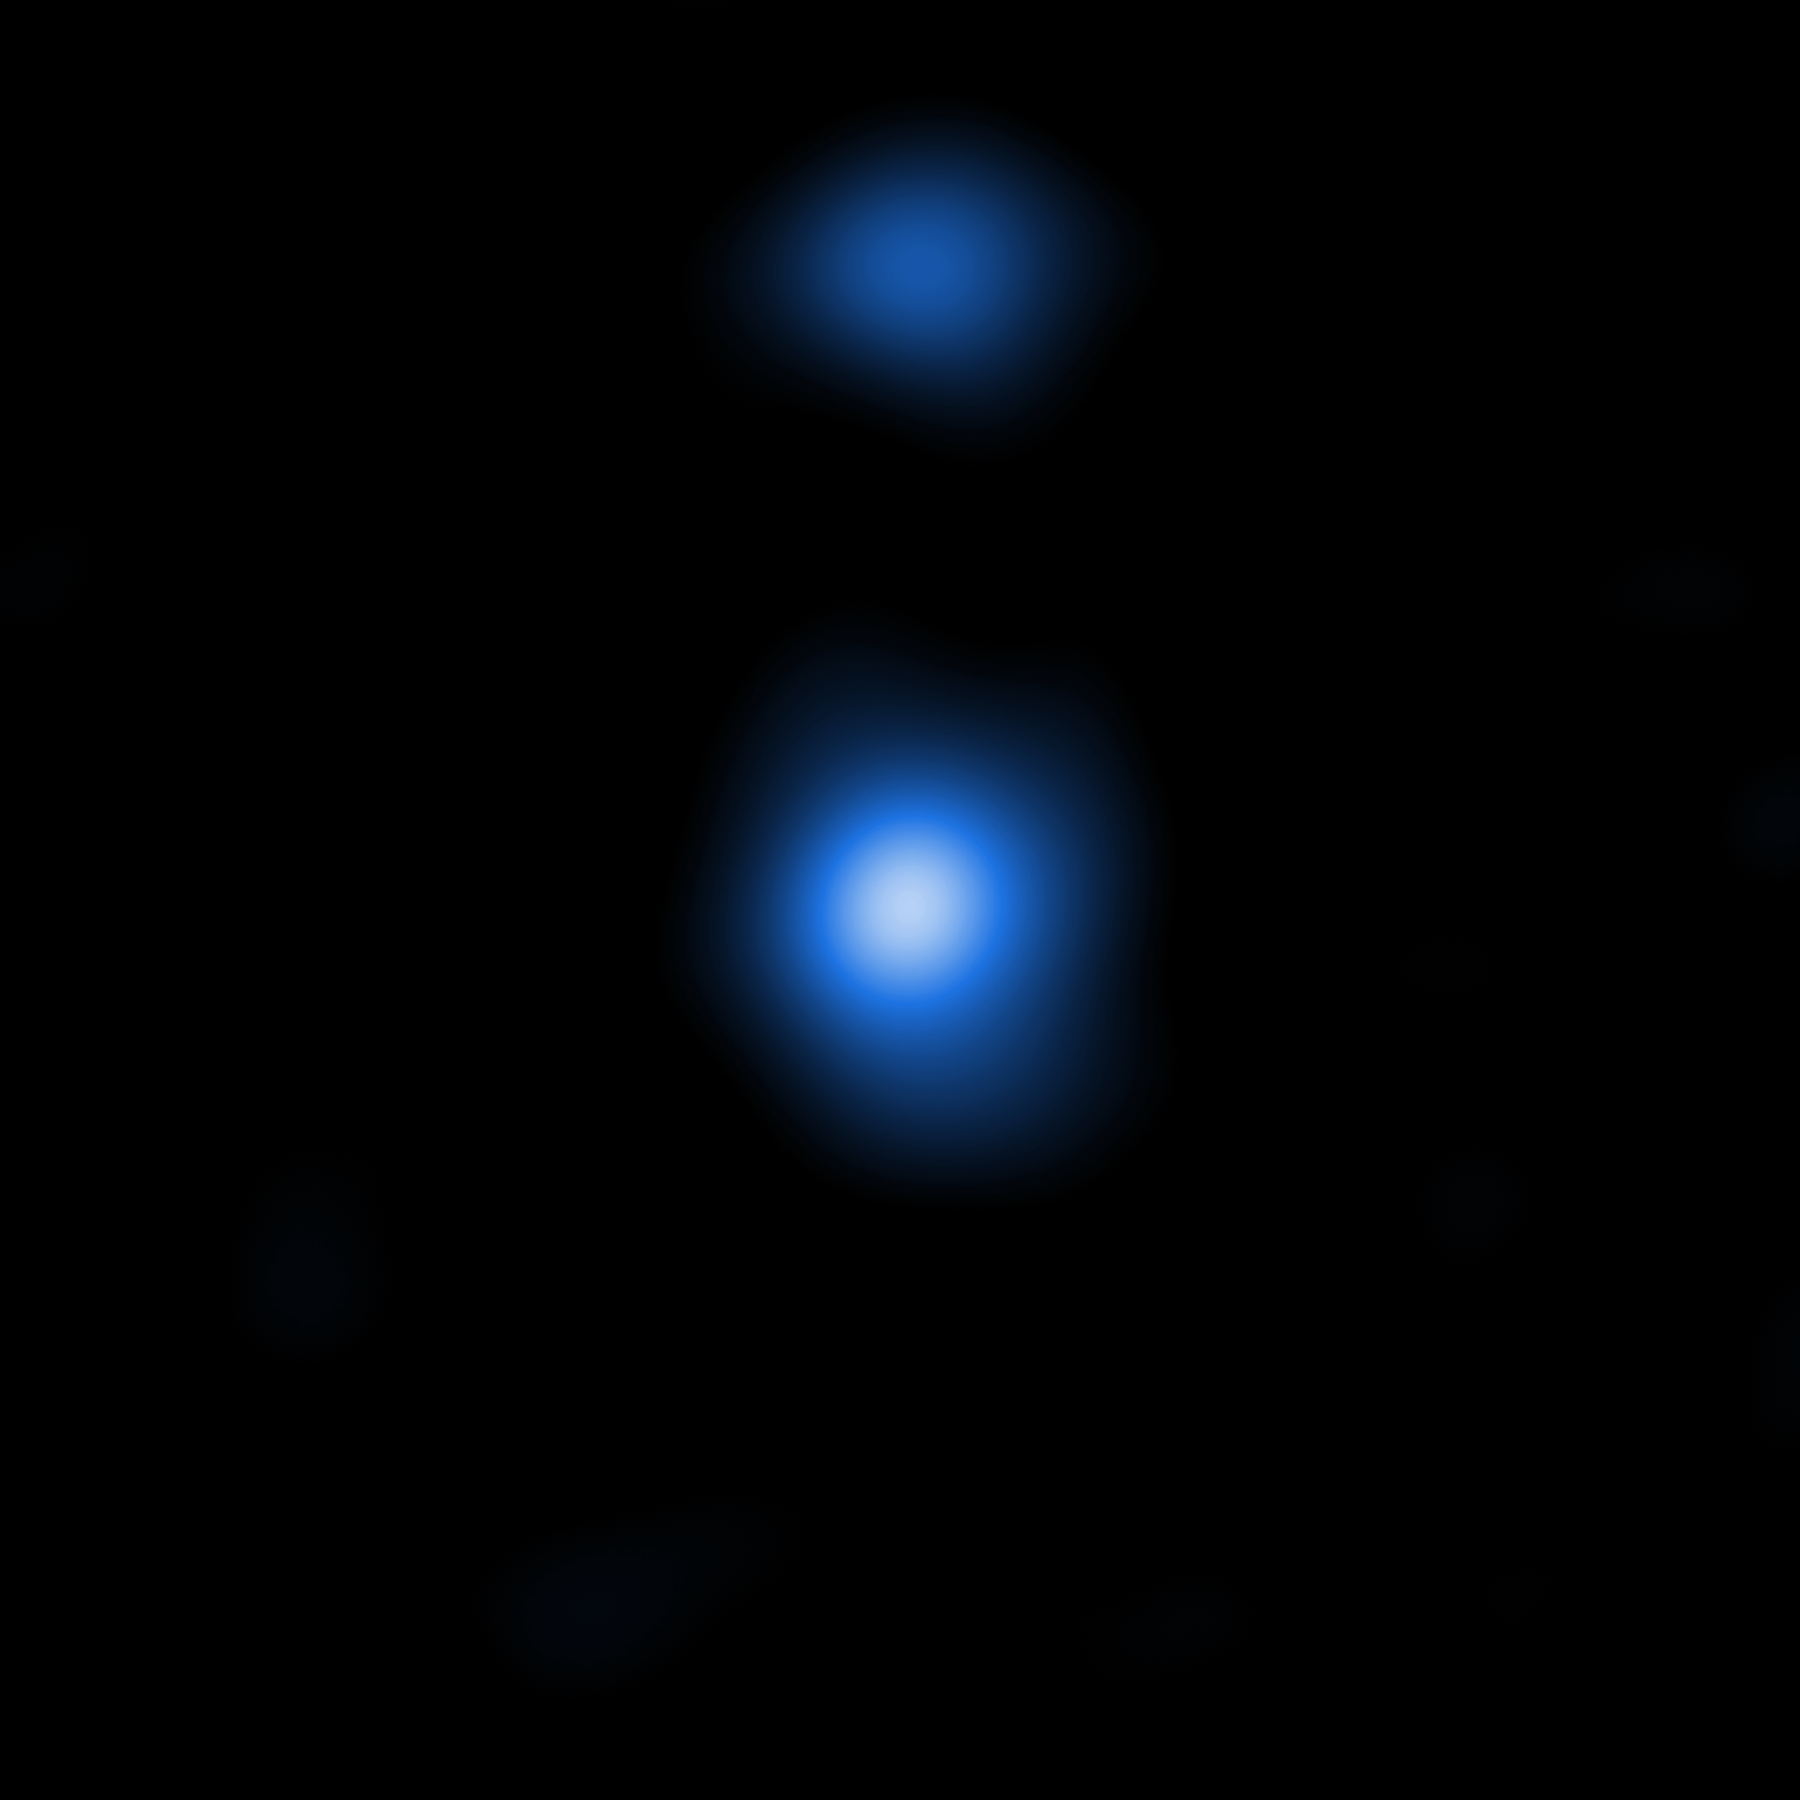

Supermassive black hole seed seen by Chandra

This image shows one of two detected supermassive black hole seeds, OBJ29323, as it is seen by the NASA Chandra Space Telescope. The properties of the X-ray data match those predicted by models produced by the Italian research team.

Credit: NASA/CXC/Scuola Normale Superiore/Pacucci